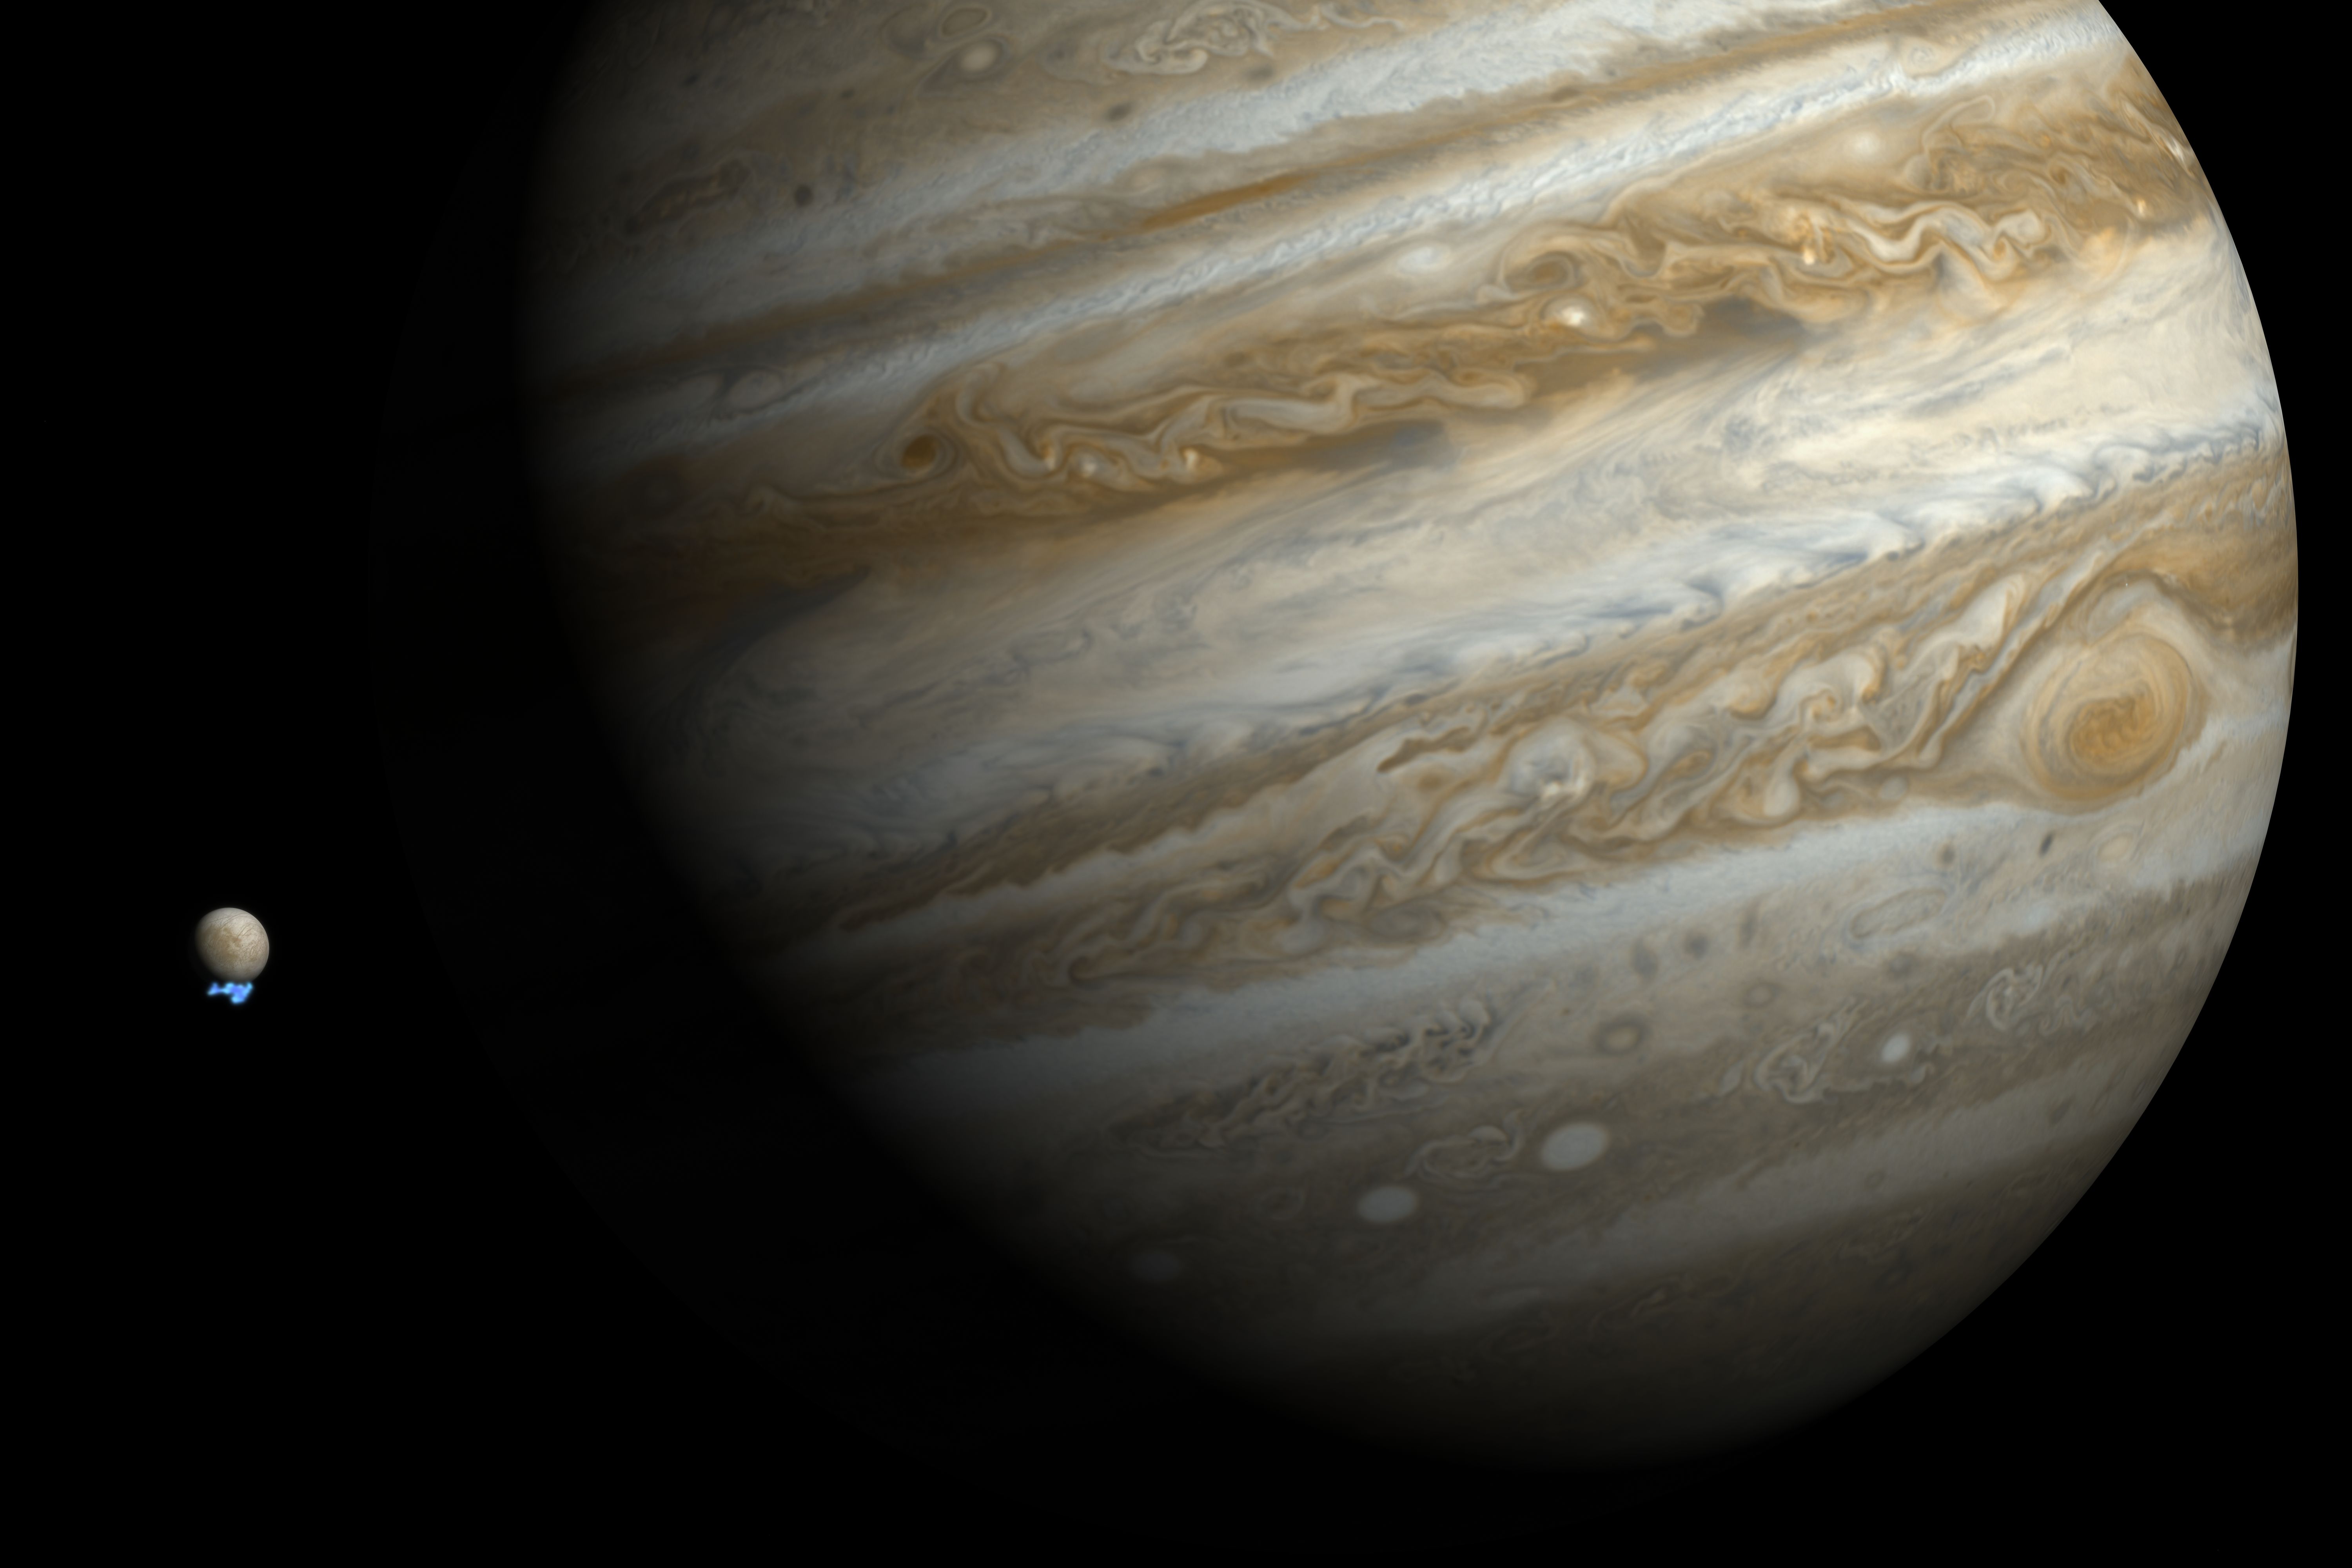

Water vapour plumes on Jupiter's moon Europa (artist's impression)

This artist's impression shows Jupiter and its moon Europa using actual Jupiter and Europa images in visible light. The Hubble ultraviolet images showing the faint emission from the water vapour plumes have been superimposed, respecting the size but not the brightness of the plumes.

Credit: NASA, ESA, and M. Kornmesser. Science Credit: NASA, ESA, L. Roth (Southwest Research Institute and University of Cologne, Germany), J. Saur (University of Cologne, Germany), K. Retherford (Southwest Research Institute), D. Strobel and P. Feldman (Johns Hopkins University), M. McGrath (Marshall Space Flight Center), and F. Nimmo (University of California, Santa Cruz)